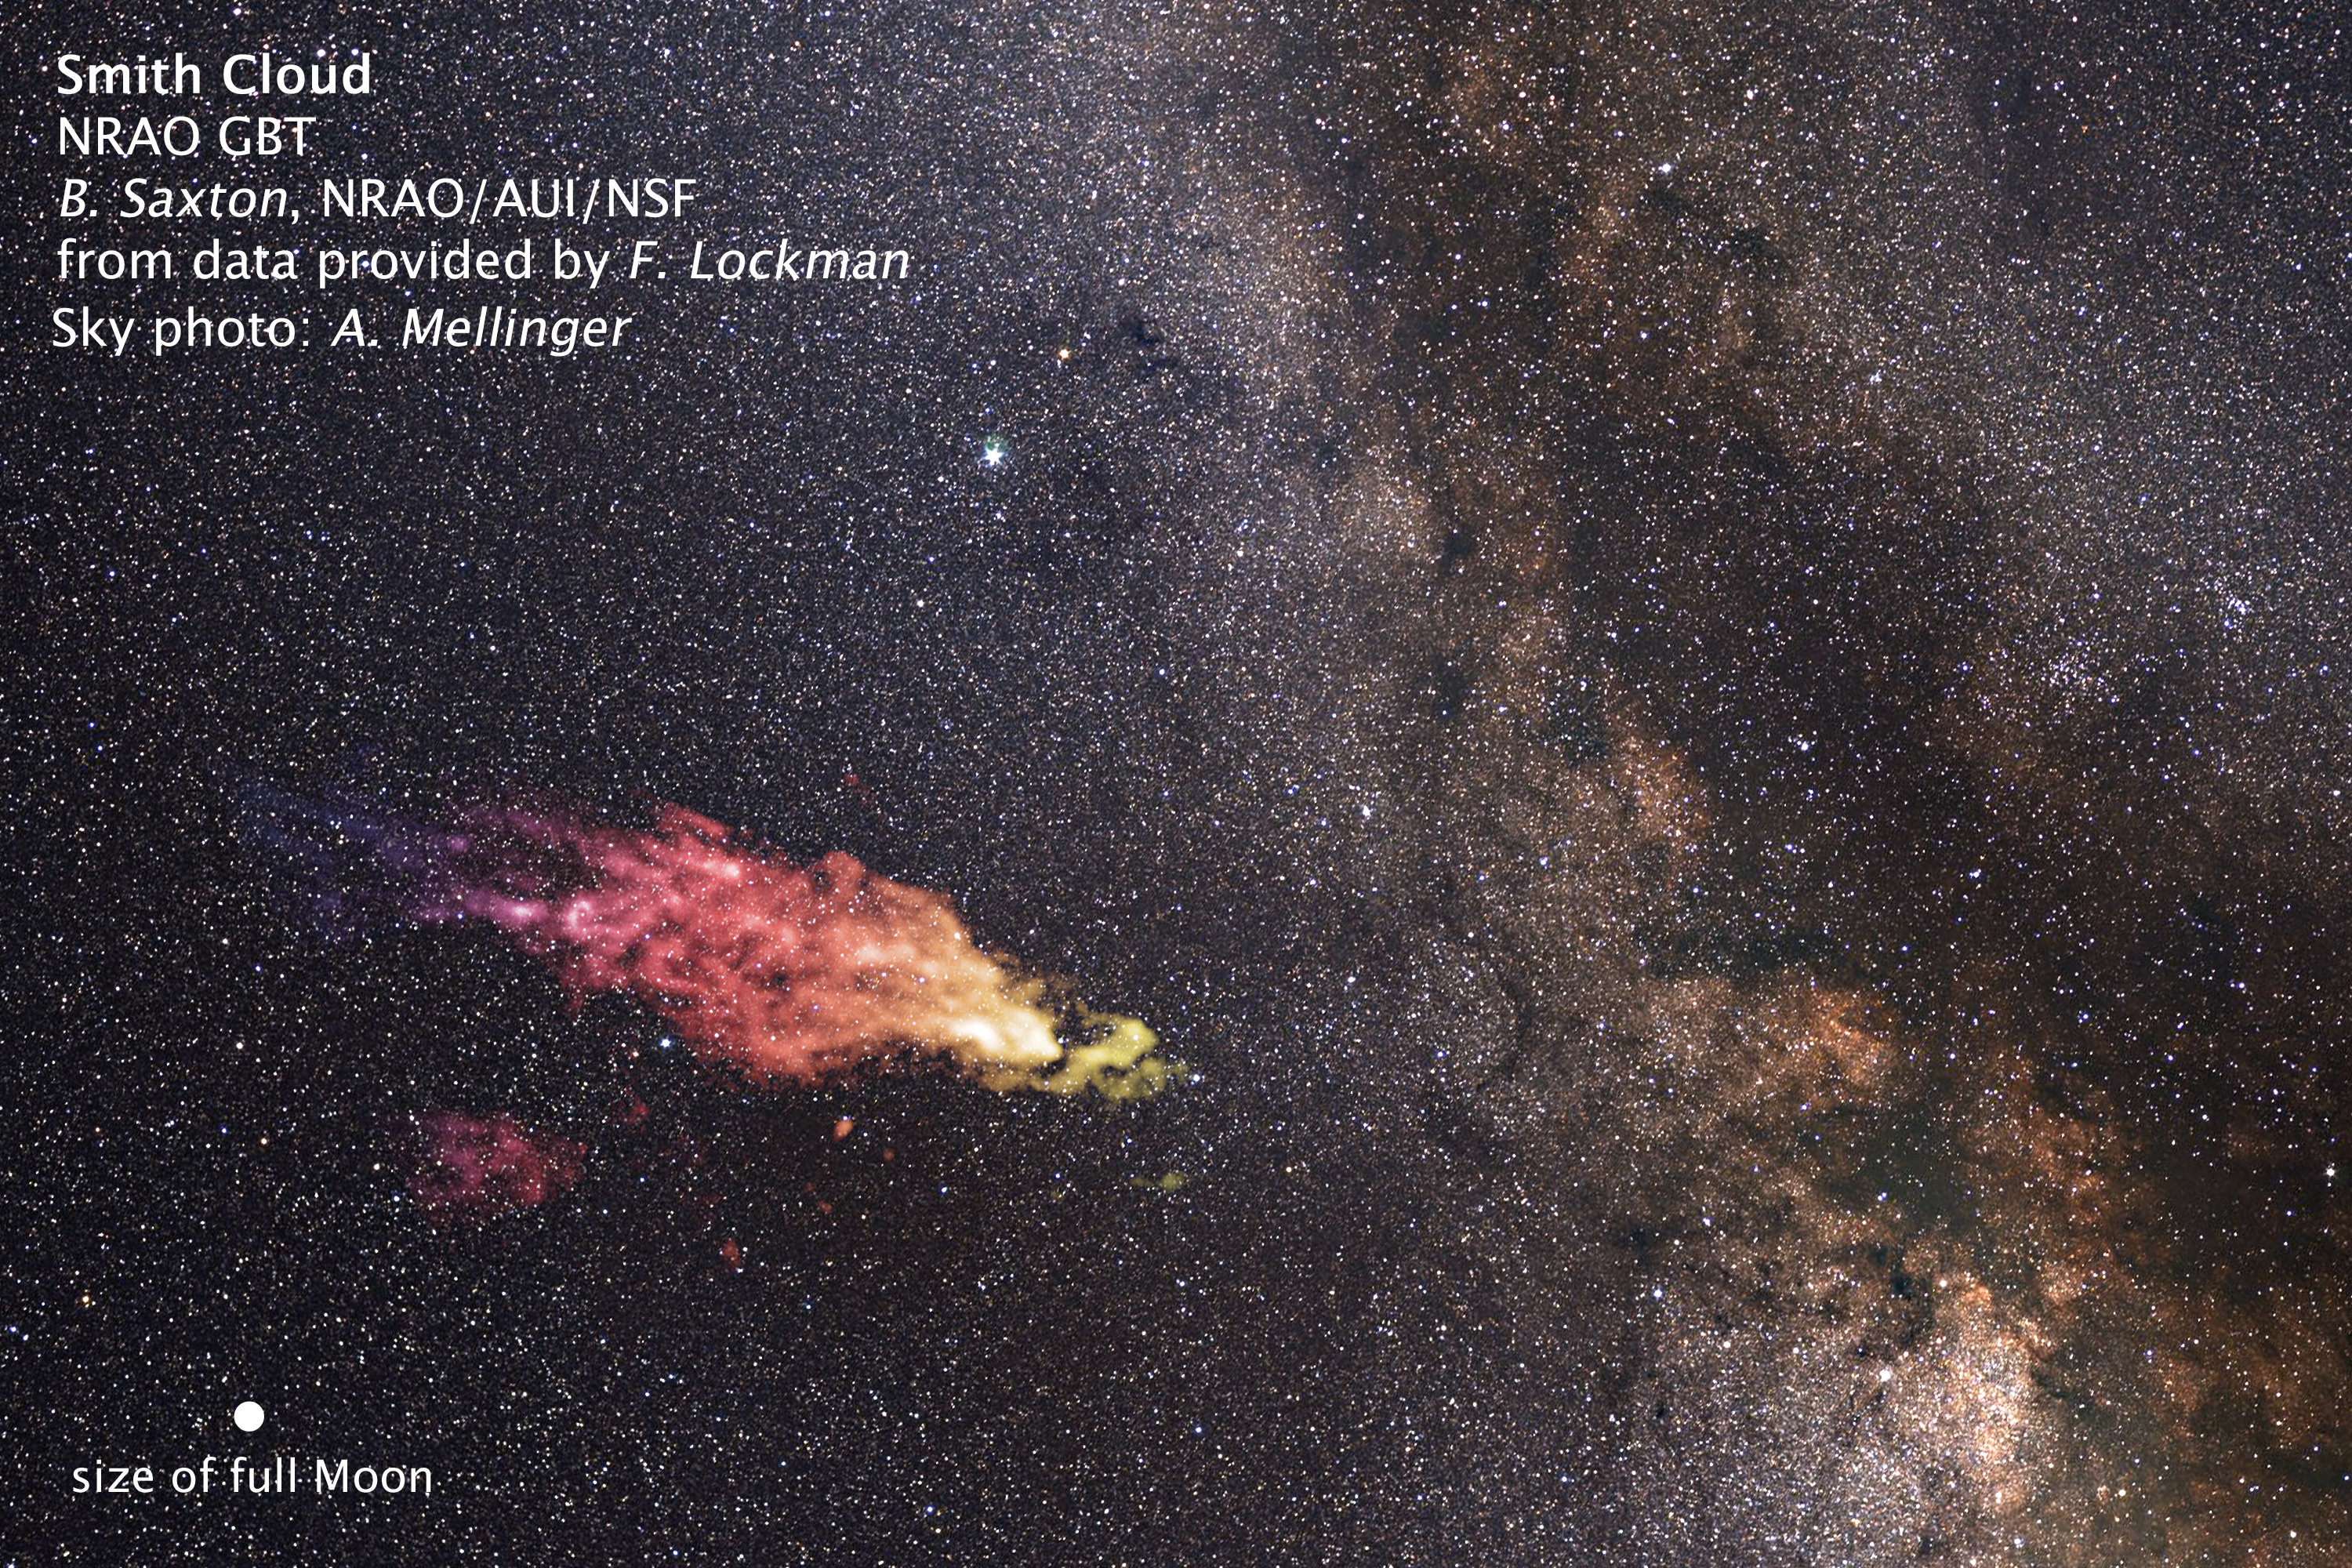

Size of Smith Cloud on the sky

This composite image shows the size and location of the Smith Cloud on the sky. The cloud appears in false-color, radio wavelengths as observed by the Robert C. Byrd Green Bank Telescope in West Virginia. The visible-light image of the background star field shows the cloud's location in the direction of the summer constellation Aquila. The cloud is 15 degrees across in angular size — the width of an outstretched hand at arm's length. The apparent size of the full moon is added for comparison.

Credit: NASA, ESA, and Z. Levay (STScI), B. Saxton and F. Lockman (NRAO/AUI/NSF) and A. Mellinge